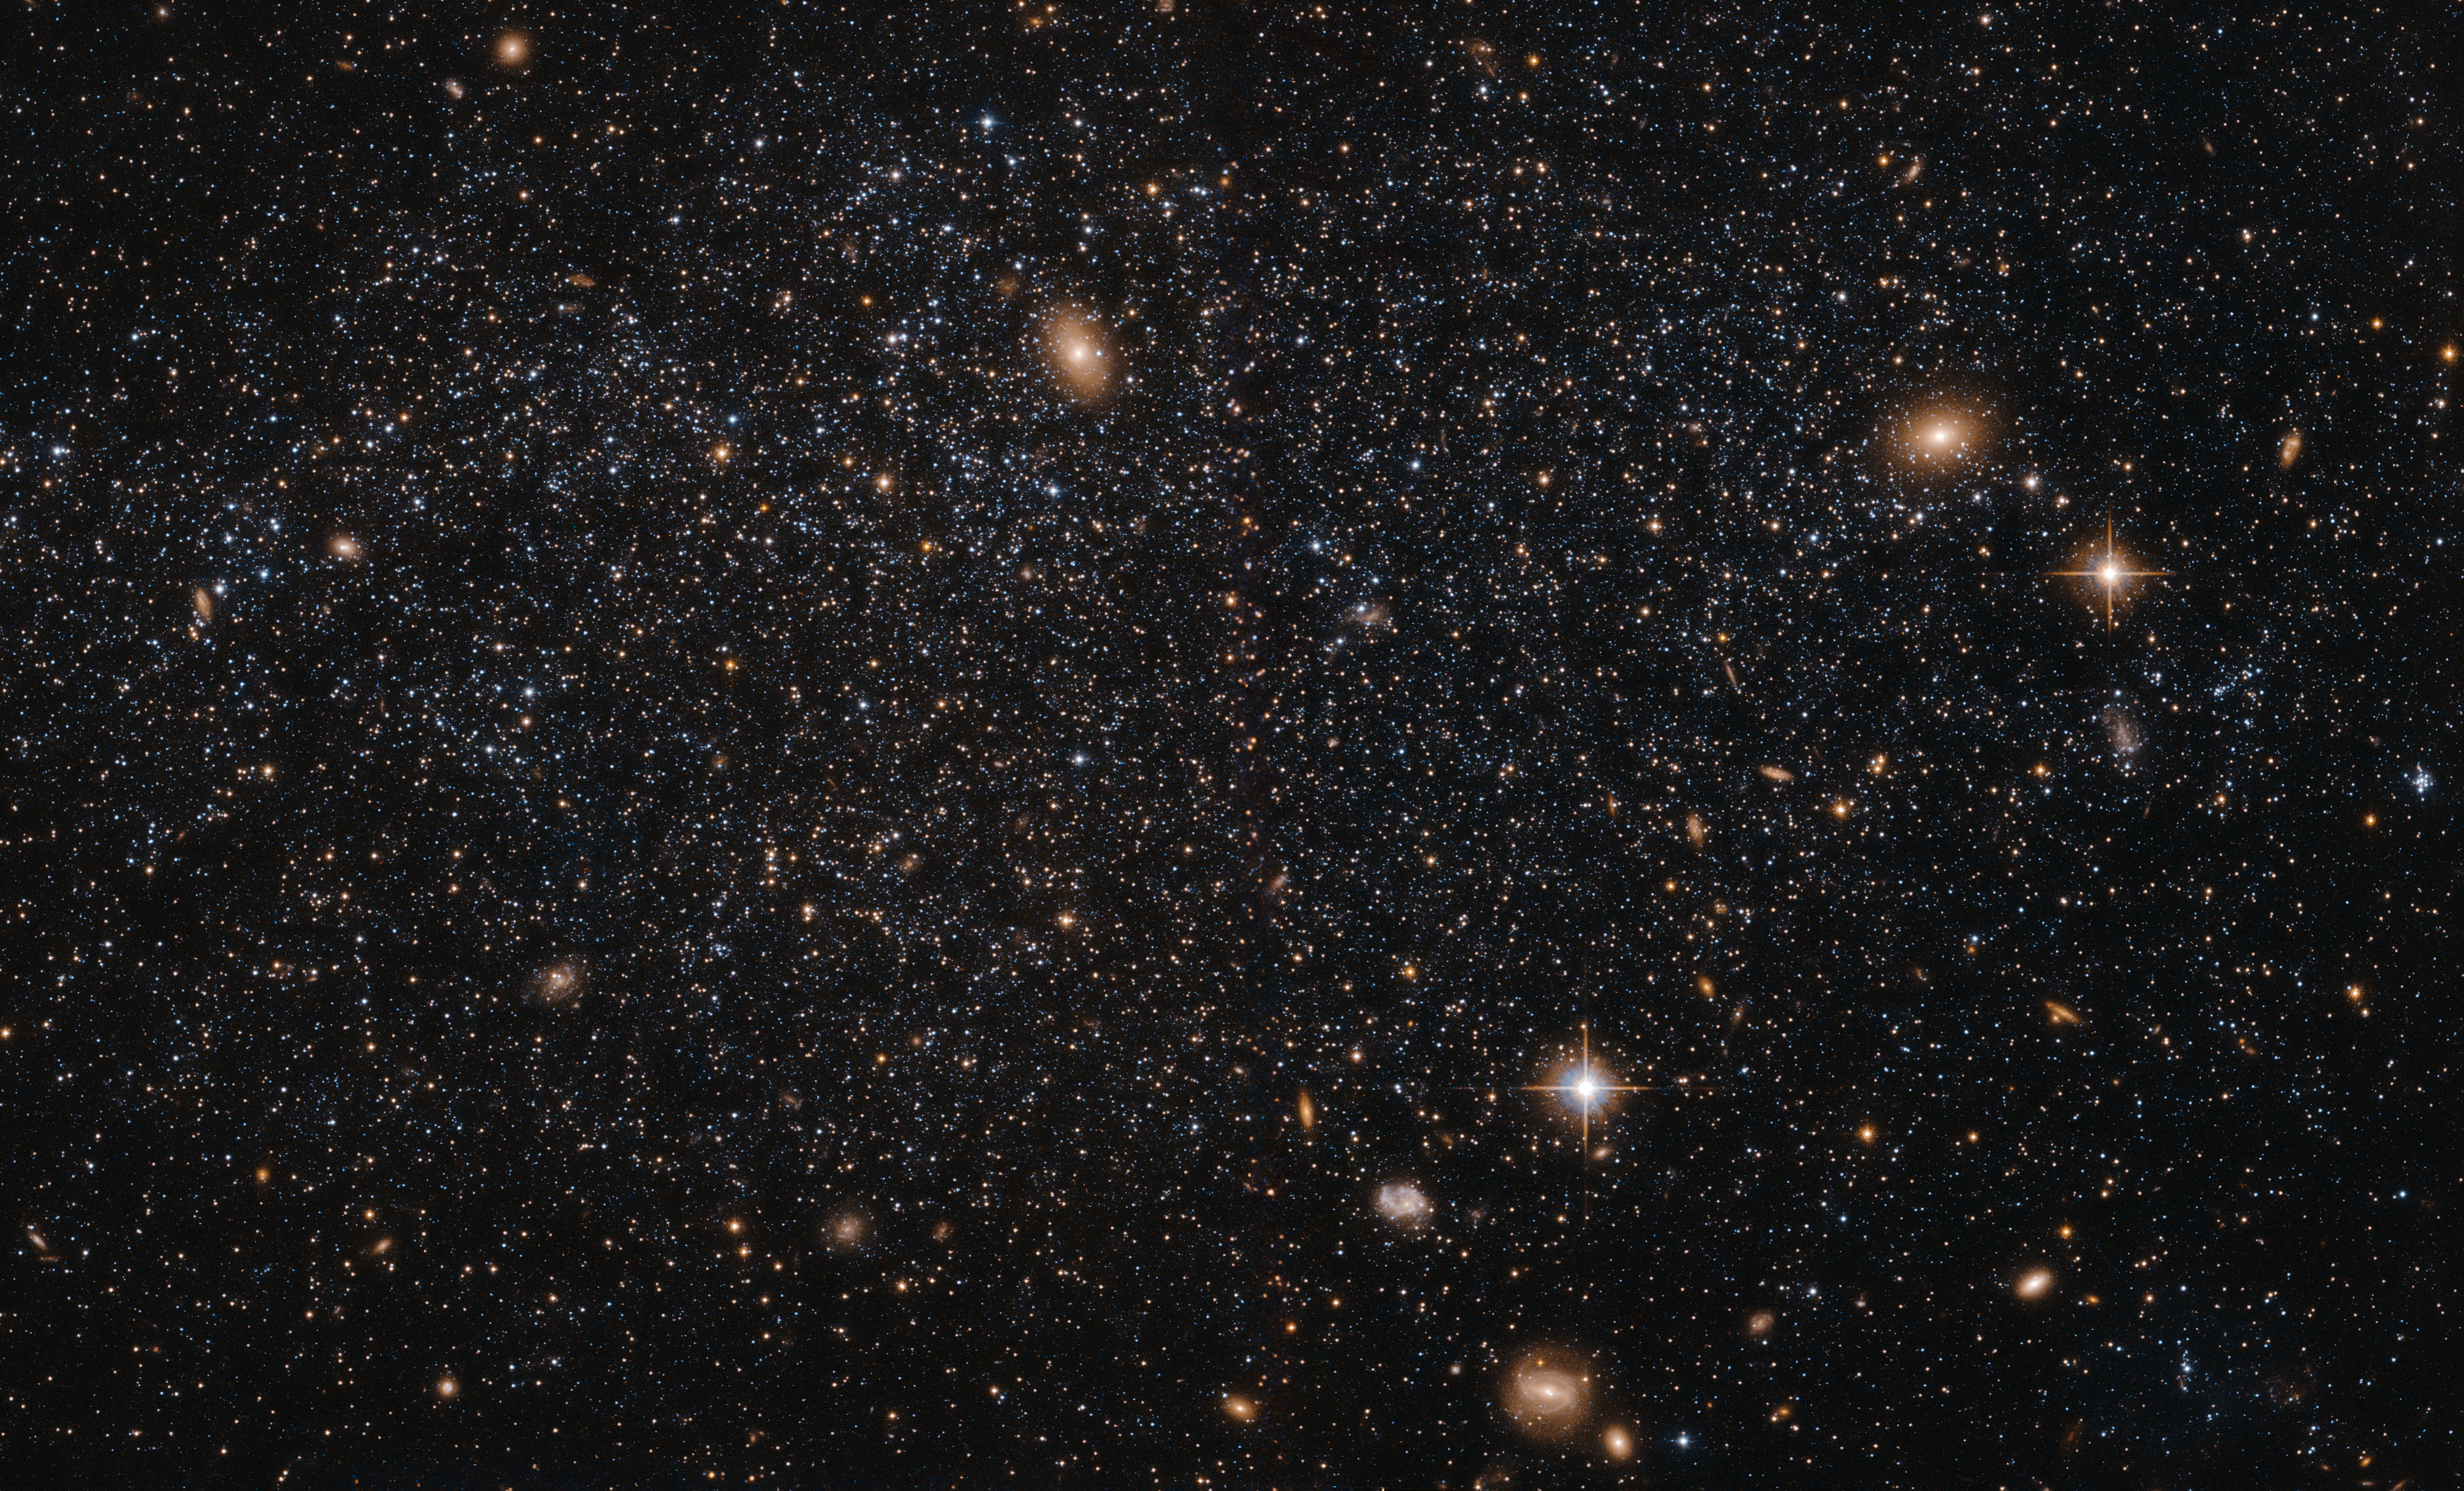

A case of suspended animation?

At first glance this NASA/ESA Hubble Space Telescope image seems to show an array of different cosmic objects, but the speckling of stars shown here actually forms a single body — a nearby dwarf galaxy known as Leo A. Its few million stars are so sparsely distributed that some distant background galaxies are visible through it. Leo A itself is at a distance of about 2.5 million light-years from Earth and a member of the Local Group of galaxies; a group that includes the Milky Way and the well-known Andromeda galaxy.

Astronomers study dwarf galaxies because they are very numerous and are simpler in structure than their giant cousins. However, their small size makes them difficult to study at great distances. As a result, the dwarf galaxies of the Local Group are of particular interest, as they are close enough to study in detail.

As it turns out, Leo A is a rather unusual galaxy. It is one of the most isolated galaxies in the Local Group, has no obvious structural features beyond being a roughly spherical mass of stars, and shows no evidence for recent interactions with any of its few neighbours. However, the galaxy’s contents are overwhelmingly dominated by relatively young stars, something that would normally be the result of a recent interaction with another galaxy. Around 90% of the stars in Leo A are less than eight billion years old — young in cosmic terms! This raises a number of intriguing questions about why star formation in Leo A did not take place on the “usual” timescale, but instead waited until it was good and ready.

Credit: ESA/Hubble & NASA Acknowledgement: Judy Schmidt (Geckzilla)